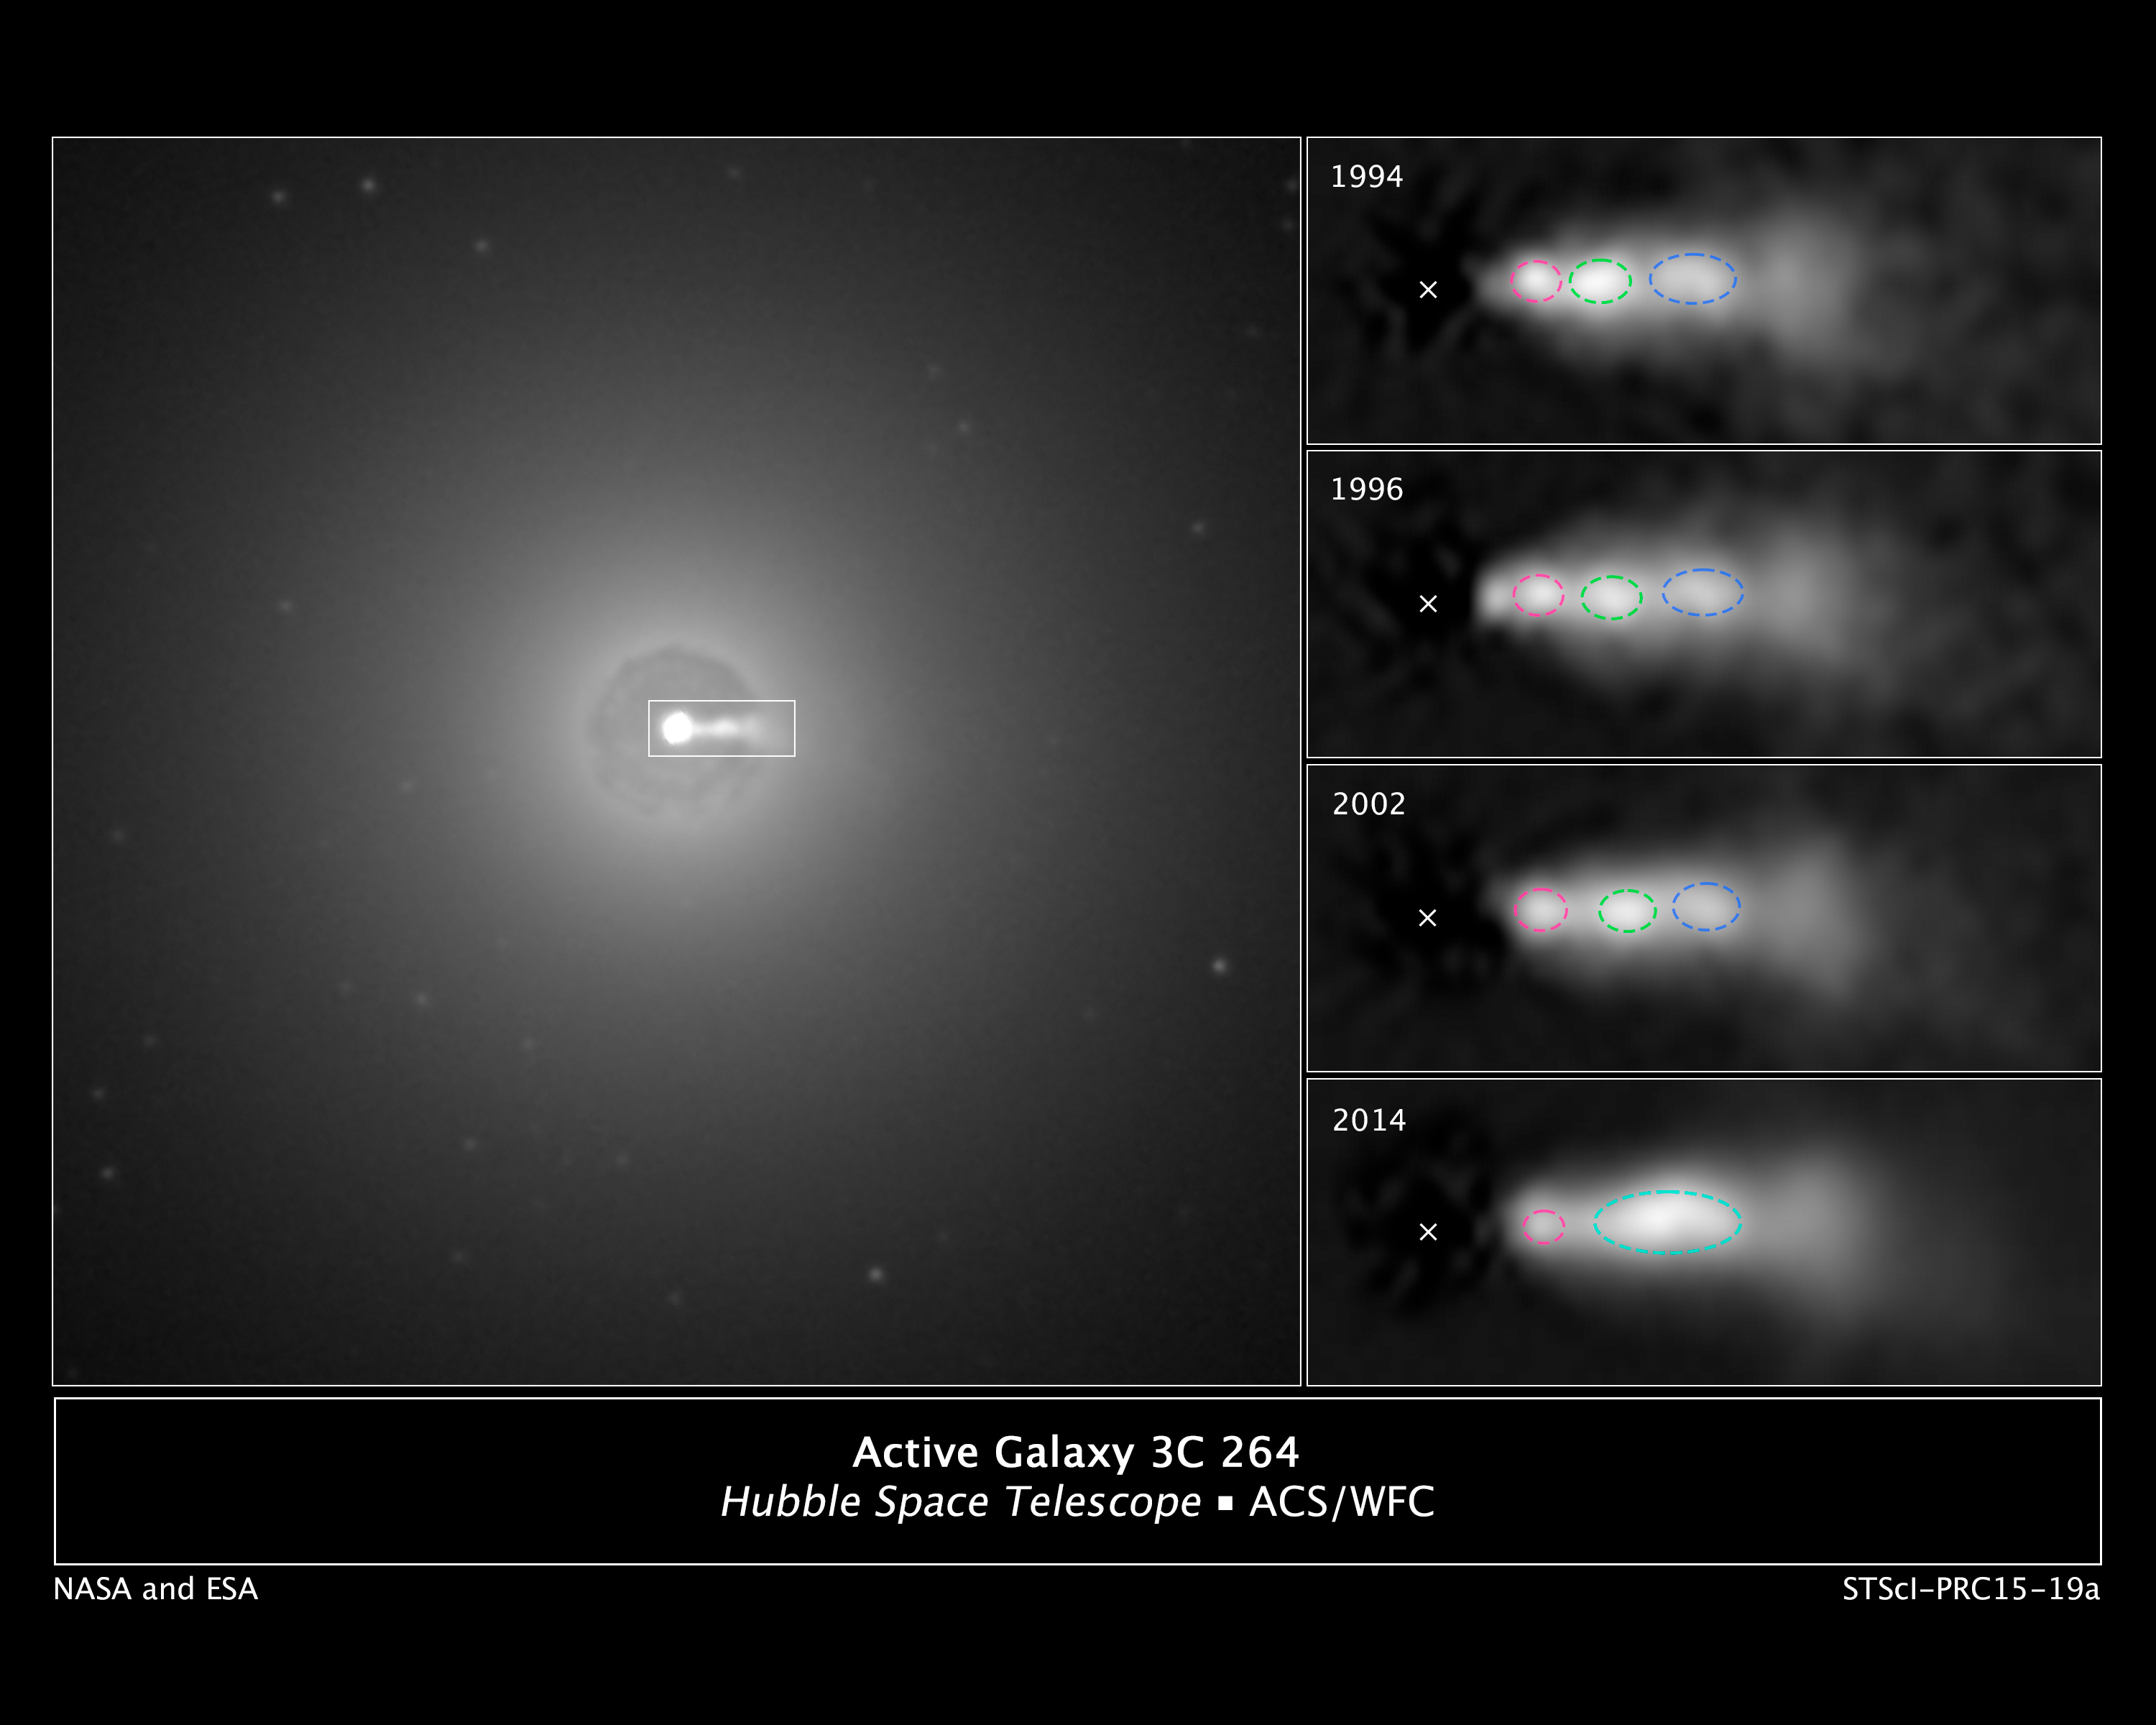

Active Galaxy 3C 264 (NGC 3862)

[Left] In this NASA Hubble Space Telescope image of the central region of the galaxy NGC 3862, an extragalactic jet of material moving at nearly the speed of light can be seen at the three o'clock position. The jet of ejected plasma is powered by energy from a supermassive black hole at the center of the elliptical galaxy, which is located 260 million light-years away in the constellation of Leo.

[Right] A sequence of Hubble images of knots (outlined in red, green, and blue) shows them moving along the jet over a 20-year span of observing. Astronomers were surprised to discover that the central knot (green) caught up with and merged with the knot in front of it (blue). The new analysis suggests that shocks produced by collisions within the jet further accelerate particles that are confined to a narrowly focused beam of radiation. The "X" marks the location of the black hole.

Credit: NASA, ESA, and E. Meyers (STScI)